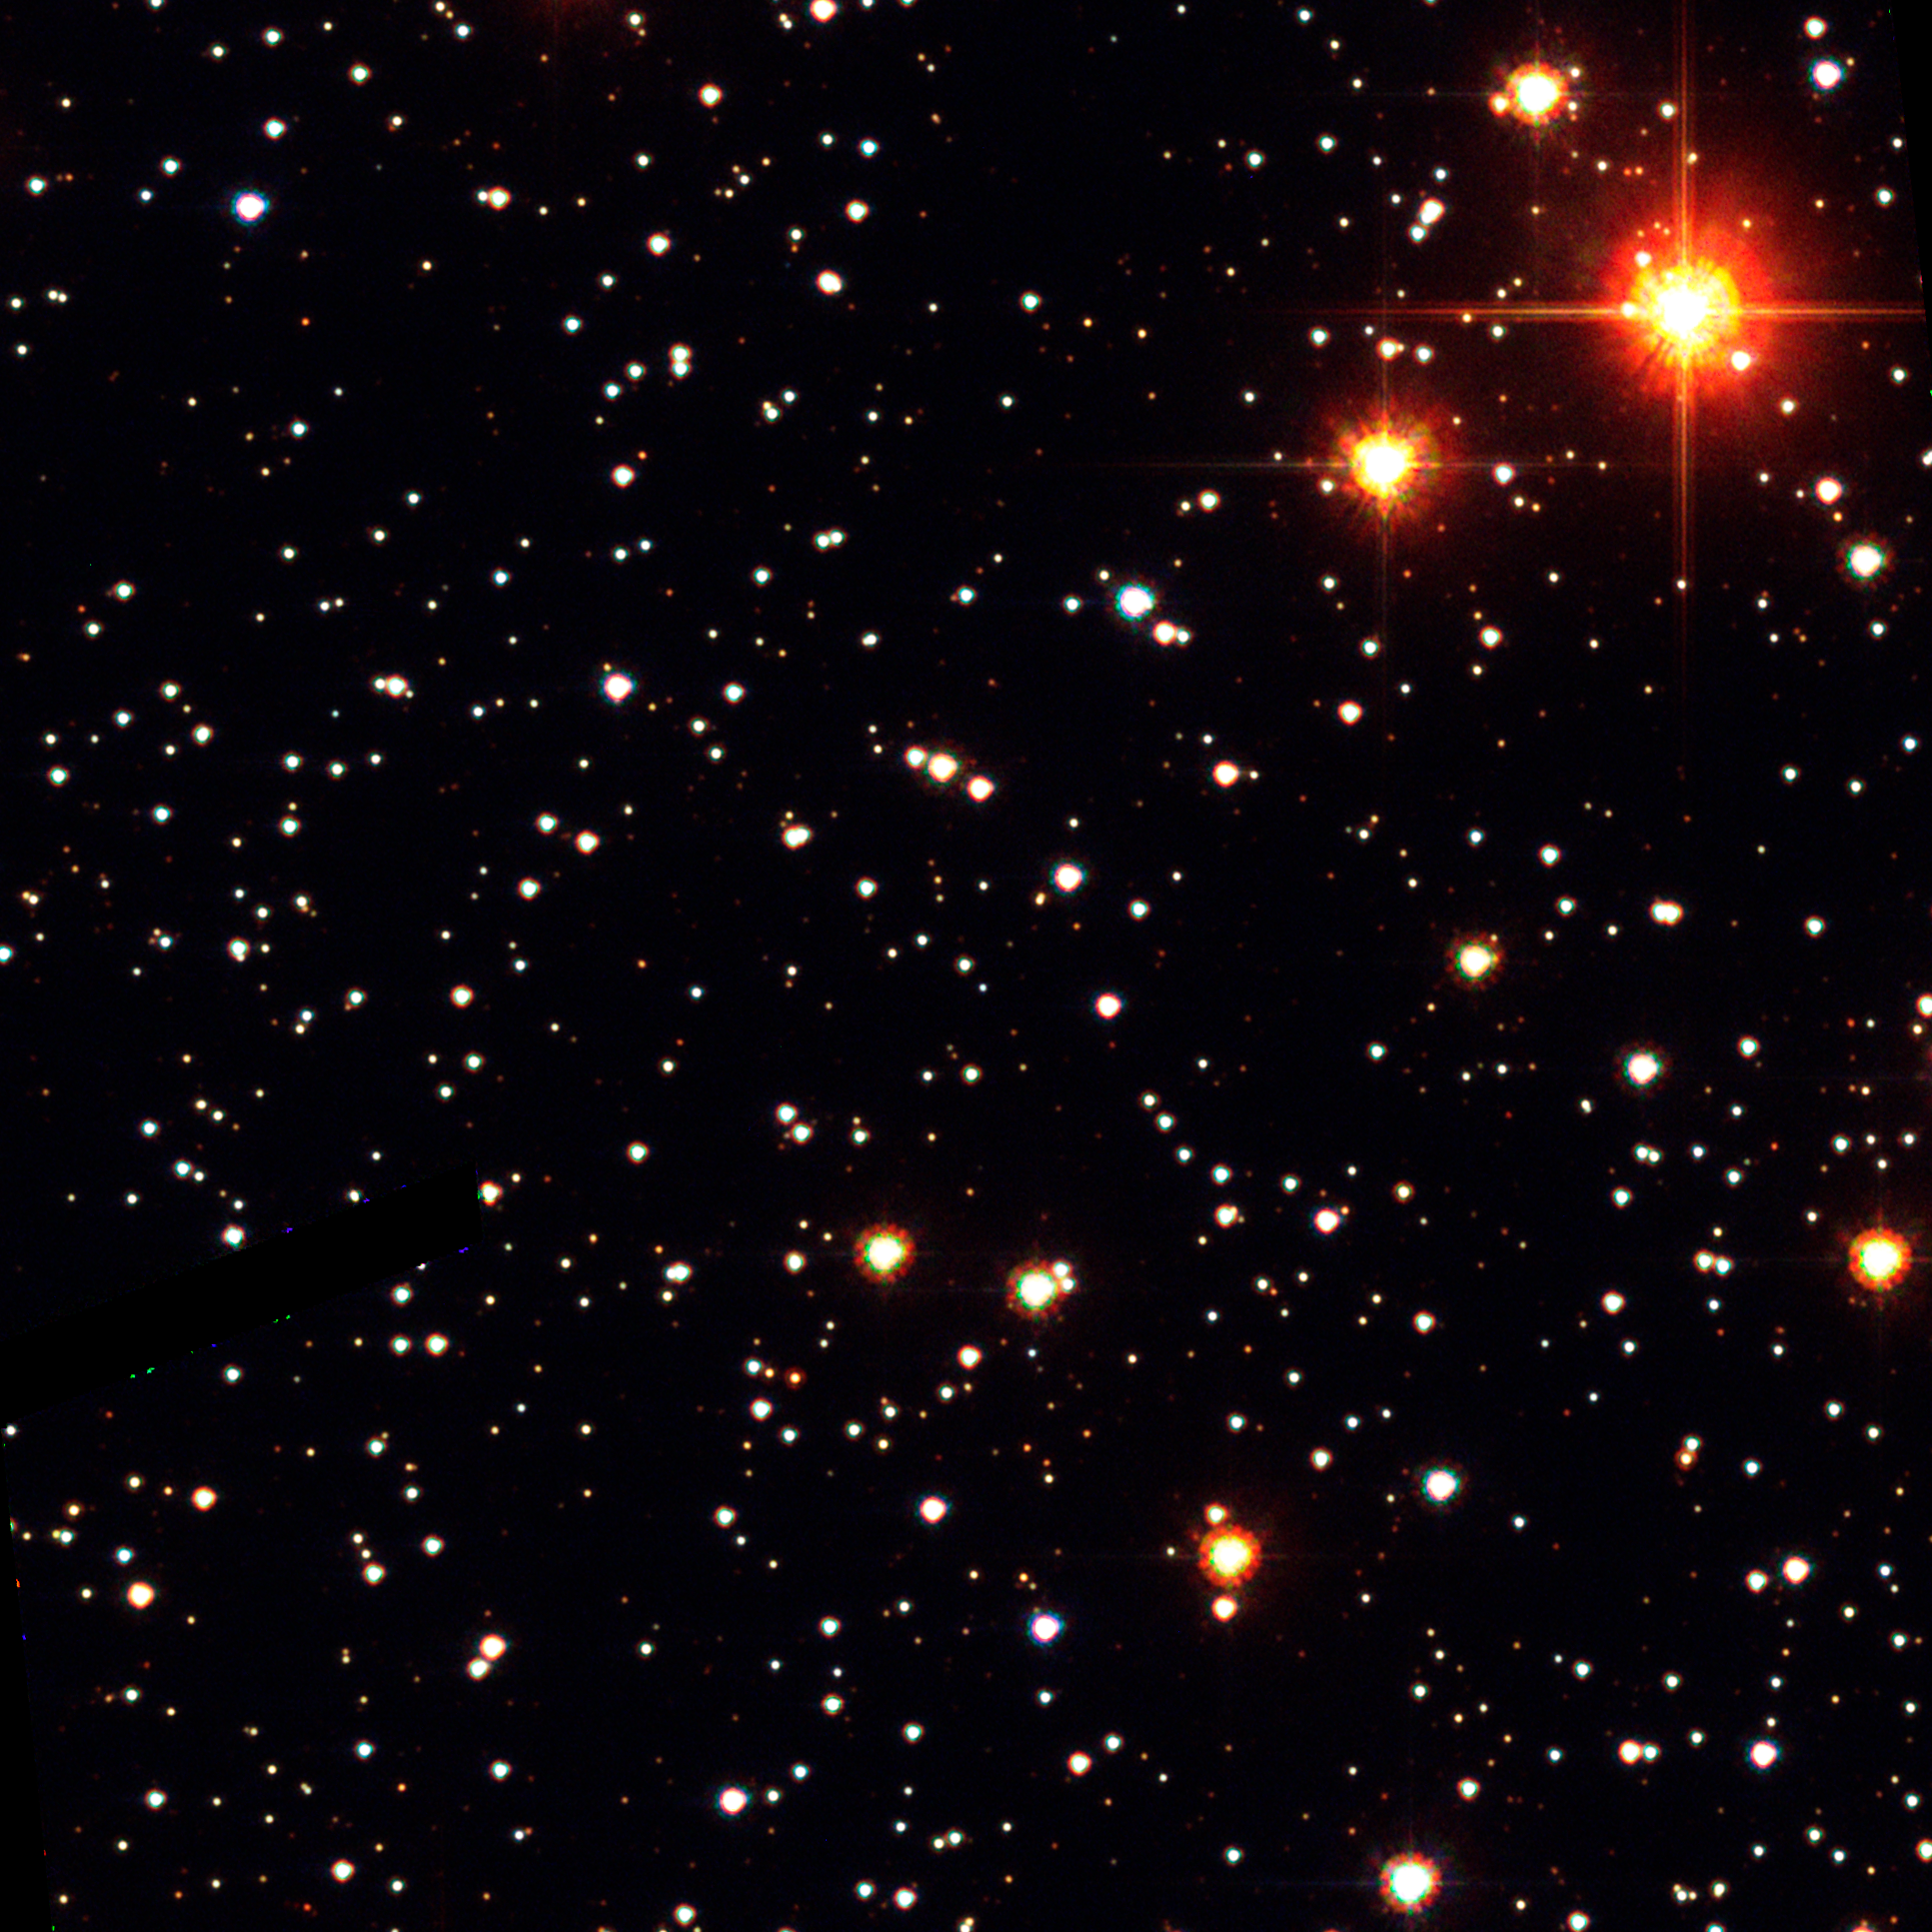

Planetary Host Star

HST ACS/HRC B, V, I composite of microlensing target OGLE-2003-BLG-235/MOA-2003-BLG-53.

Credit: NASA, ESA, D. Bennett (University of Notre Dame), and J. Anderson (Rice University)